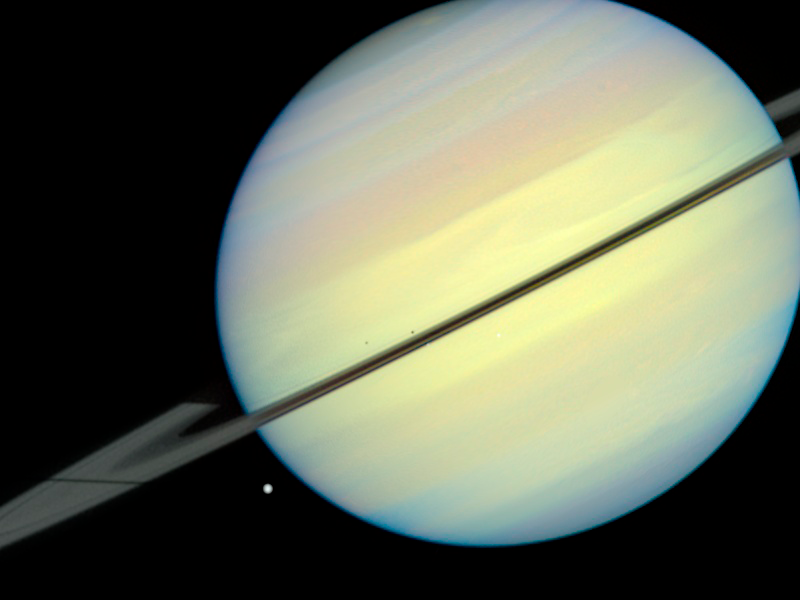

Saturn's Moons - Frame 3

This movie still captures the moons Mimas, Enceladus, and Dione as they begin their race across Saturn's disk. The still is from a movie created from images taken by NASA/ESA Hubble Space Telescope. It reveals the planet's rings tilted nearly edge-on toward the Sun, an event that occurs once every 15 years. Because of this special alignment, the moons cast shadows on the planet and its rings. Dione is on the left, Mimas is in the middle, and Enceladus is on the right. Dione is casting a long shadow on the rings.

Credit: NASA/ESA and E. Karkoschka (University of Arizona)